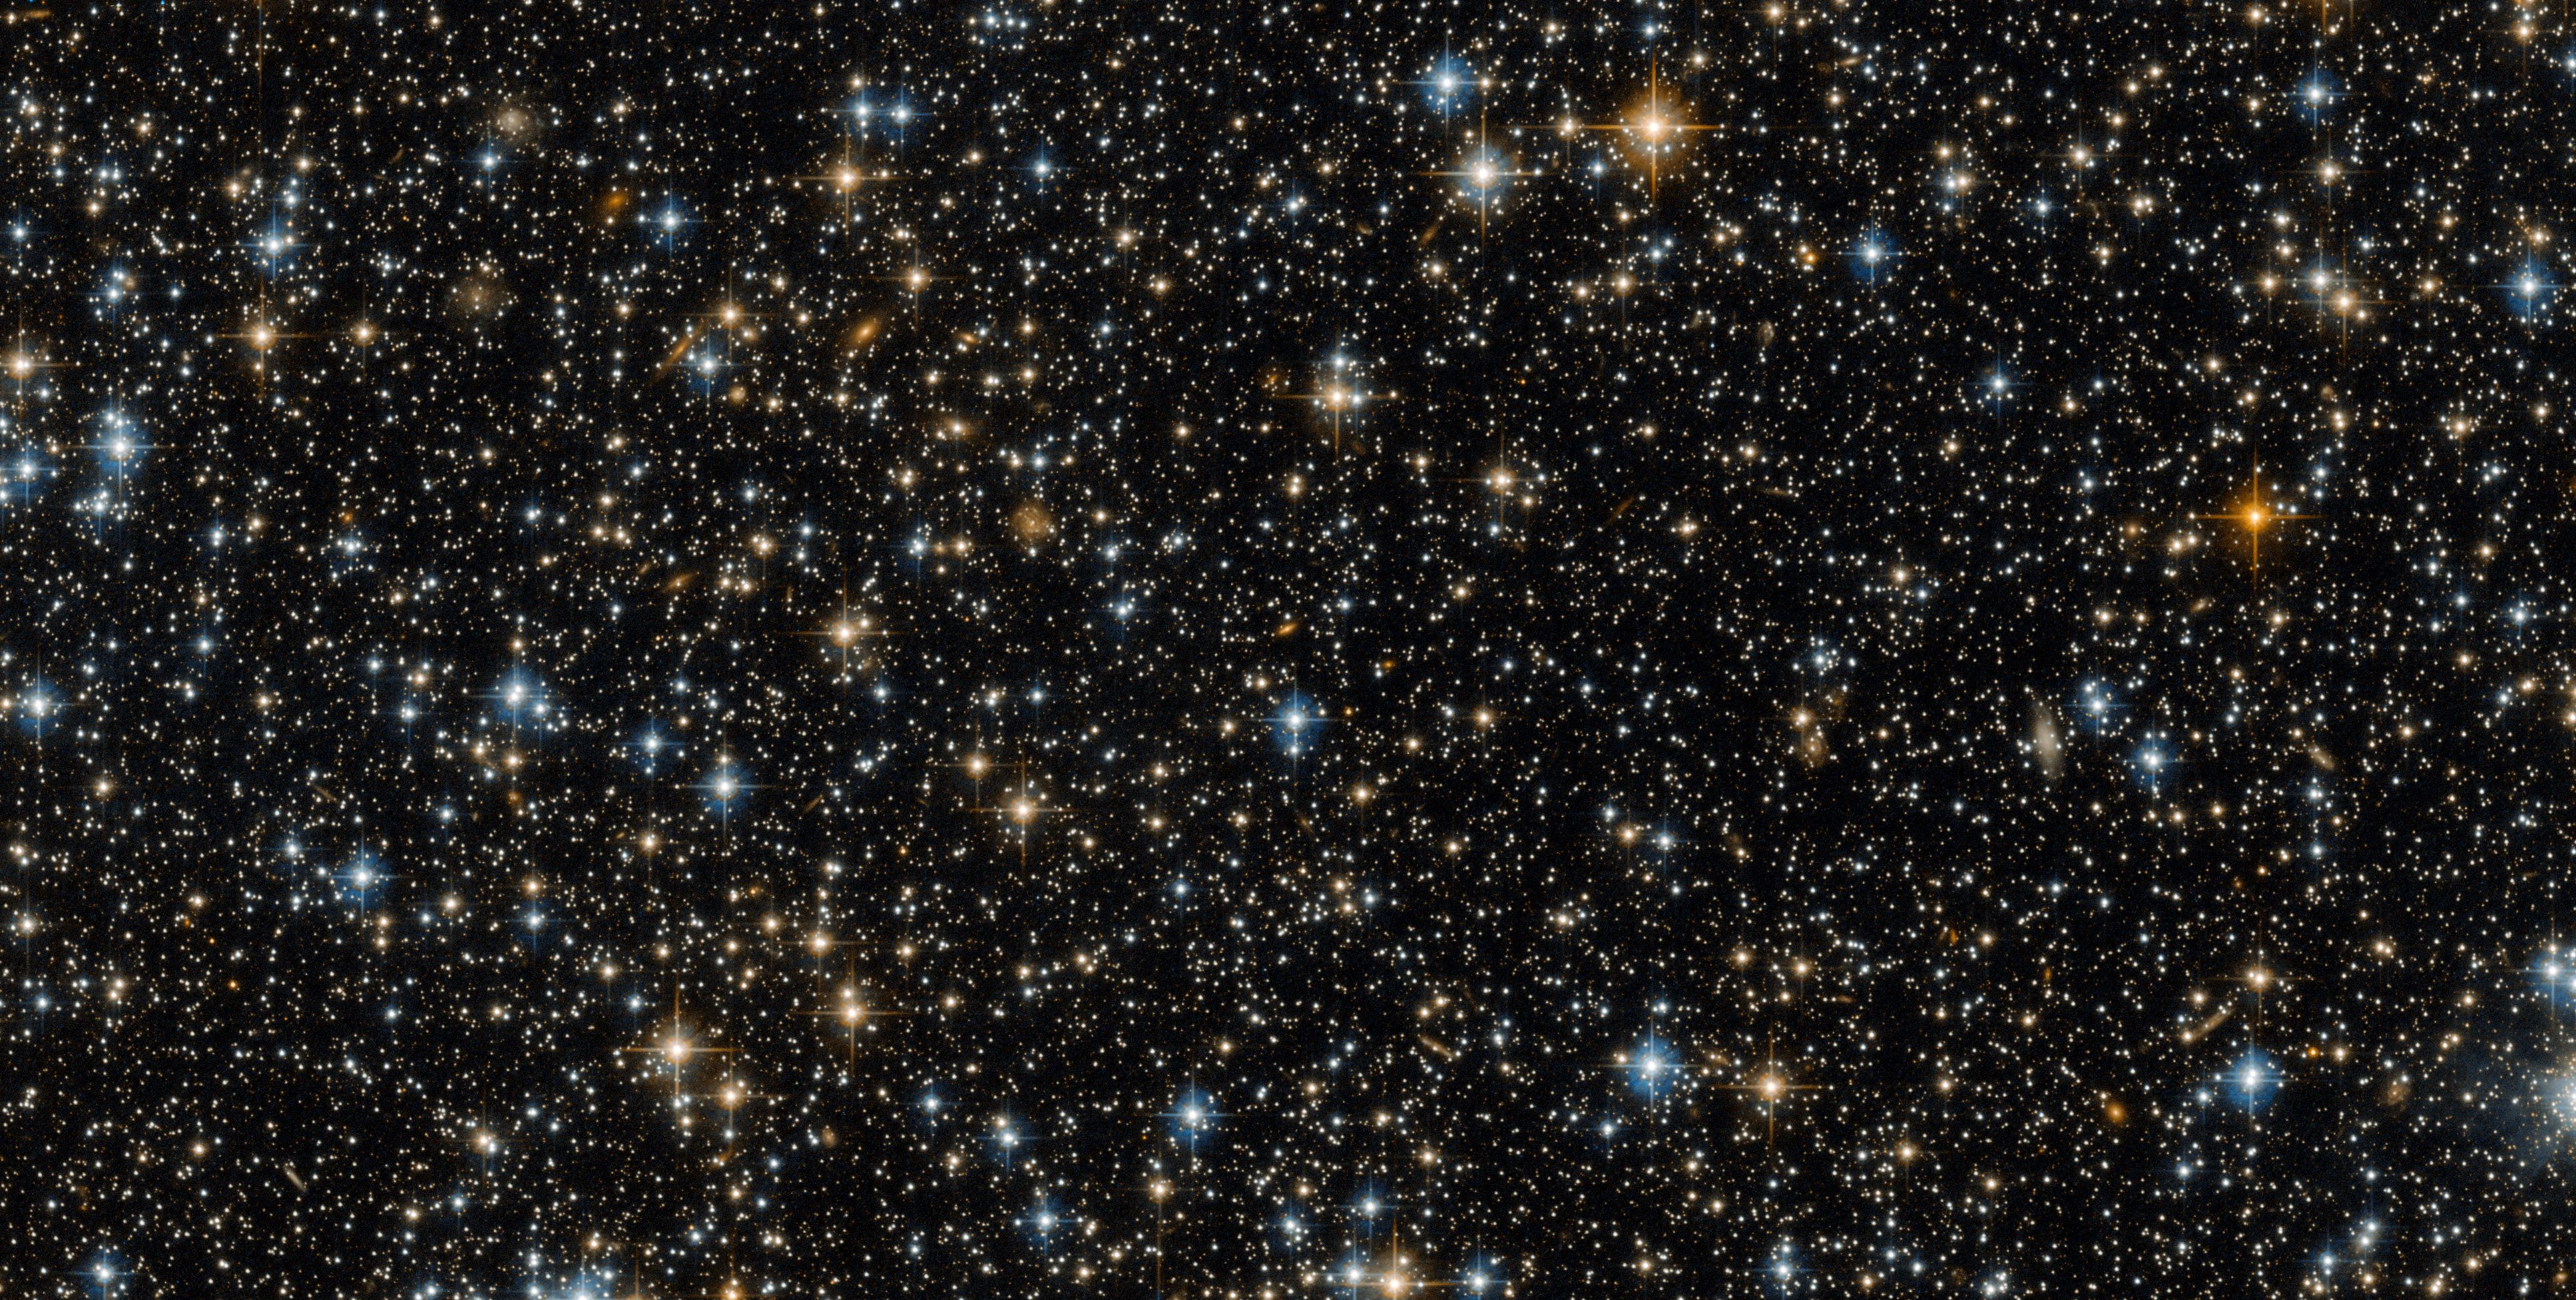

Sidekick or star of the show?

This image was captured by the NASA/ESA Hubble Space Telescope’s Advanced Camera for Surveys (ACS), a highly efficient wide-field camera covering the optical and near-infrared parts of the spectrum. While this lovely image contains hundreds of distant stars and galaxies, one vital thing is missing — the object Hubble was actually studying at the time!

This is not because the target has disappeared. The ACS actually uses two detectors: the first captures the object being studied — in this case an open star cluster known as NGC 299 — while the other detector images the patch of space just ‘beneath’ it. This is what can be seen here.

Technically, this picture is merely a sidekick of the actual object of interest — but space is bursting with activity, and this field of bright celestial bodies offers plenty of interest on its own. It may initially seem to show just stars, but a closer look reveals many of these tiny objects to be galaxies. The spiral galaxies have arms curving out from a bright centre. The fuzzier, less clearly shaped galaxies might be ellipticals. Some of these galaxies contain millions and millions of stars, but are so distant that all of their starry residents are contained within just a small pinprick of light that appears to be the same size as a single star!

The bright blue dots are very hot stars, sometimes distorted into crosses by the struts supporting Hubble’s secondary mirror. The redder dots are cooler stars, possibly in the red giant phase when a dying star cools and expands.

Credit: ESA/Hubble & NASA